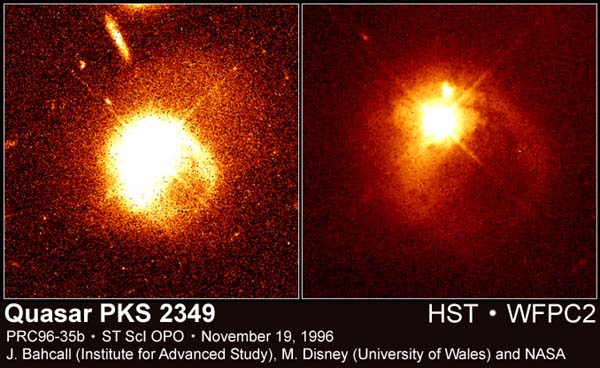

Quasar PKS 2349

Images taken by the Hubble Space Telescope have allowed astronomers to clearly see the link between quasars and their companion galaxies. Some quasars, such as the one in this two-panel image, have been caught in the act of merging or colliding with their companion galaxies.

Credit: John Bahcall (Institute for Advanced Study, Princeton) Mike Disney (University of Wales) and NASA/ESA